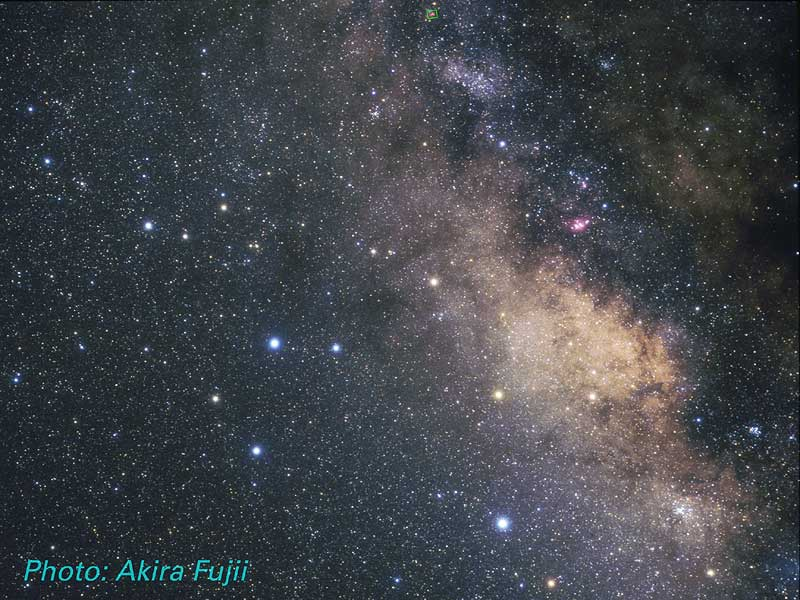

Constellation Sagittarius

Constellation Sagittarius; Location of the Omega Nebula, M17 (ground-based image).

Credit: Akira Fujii